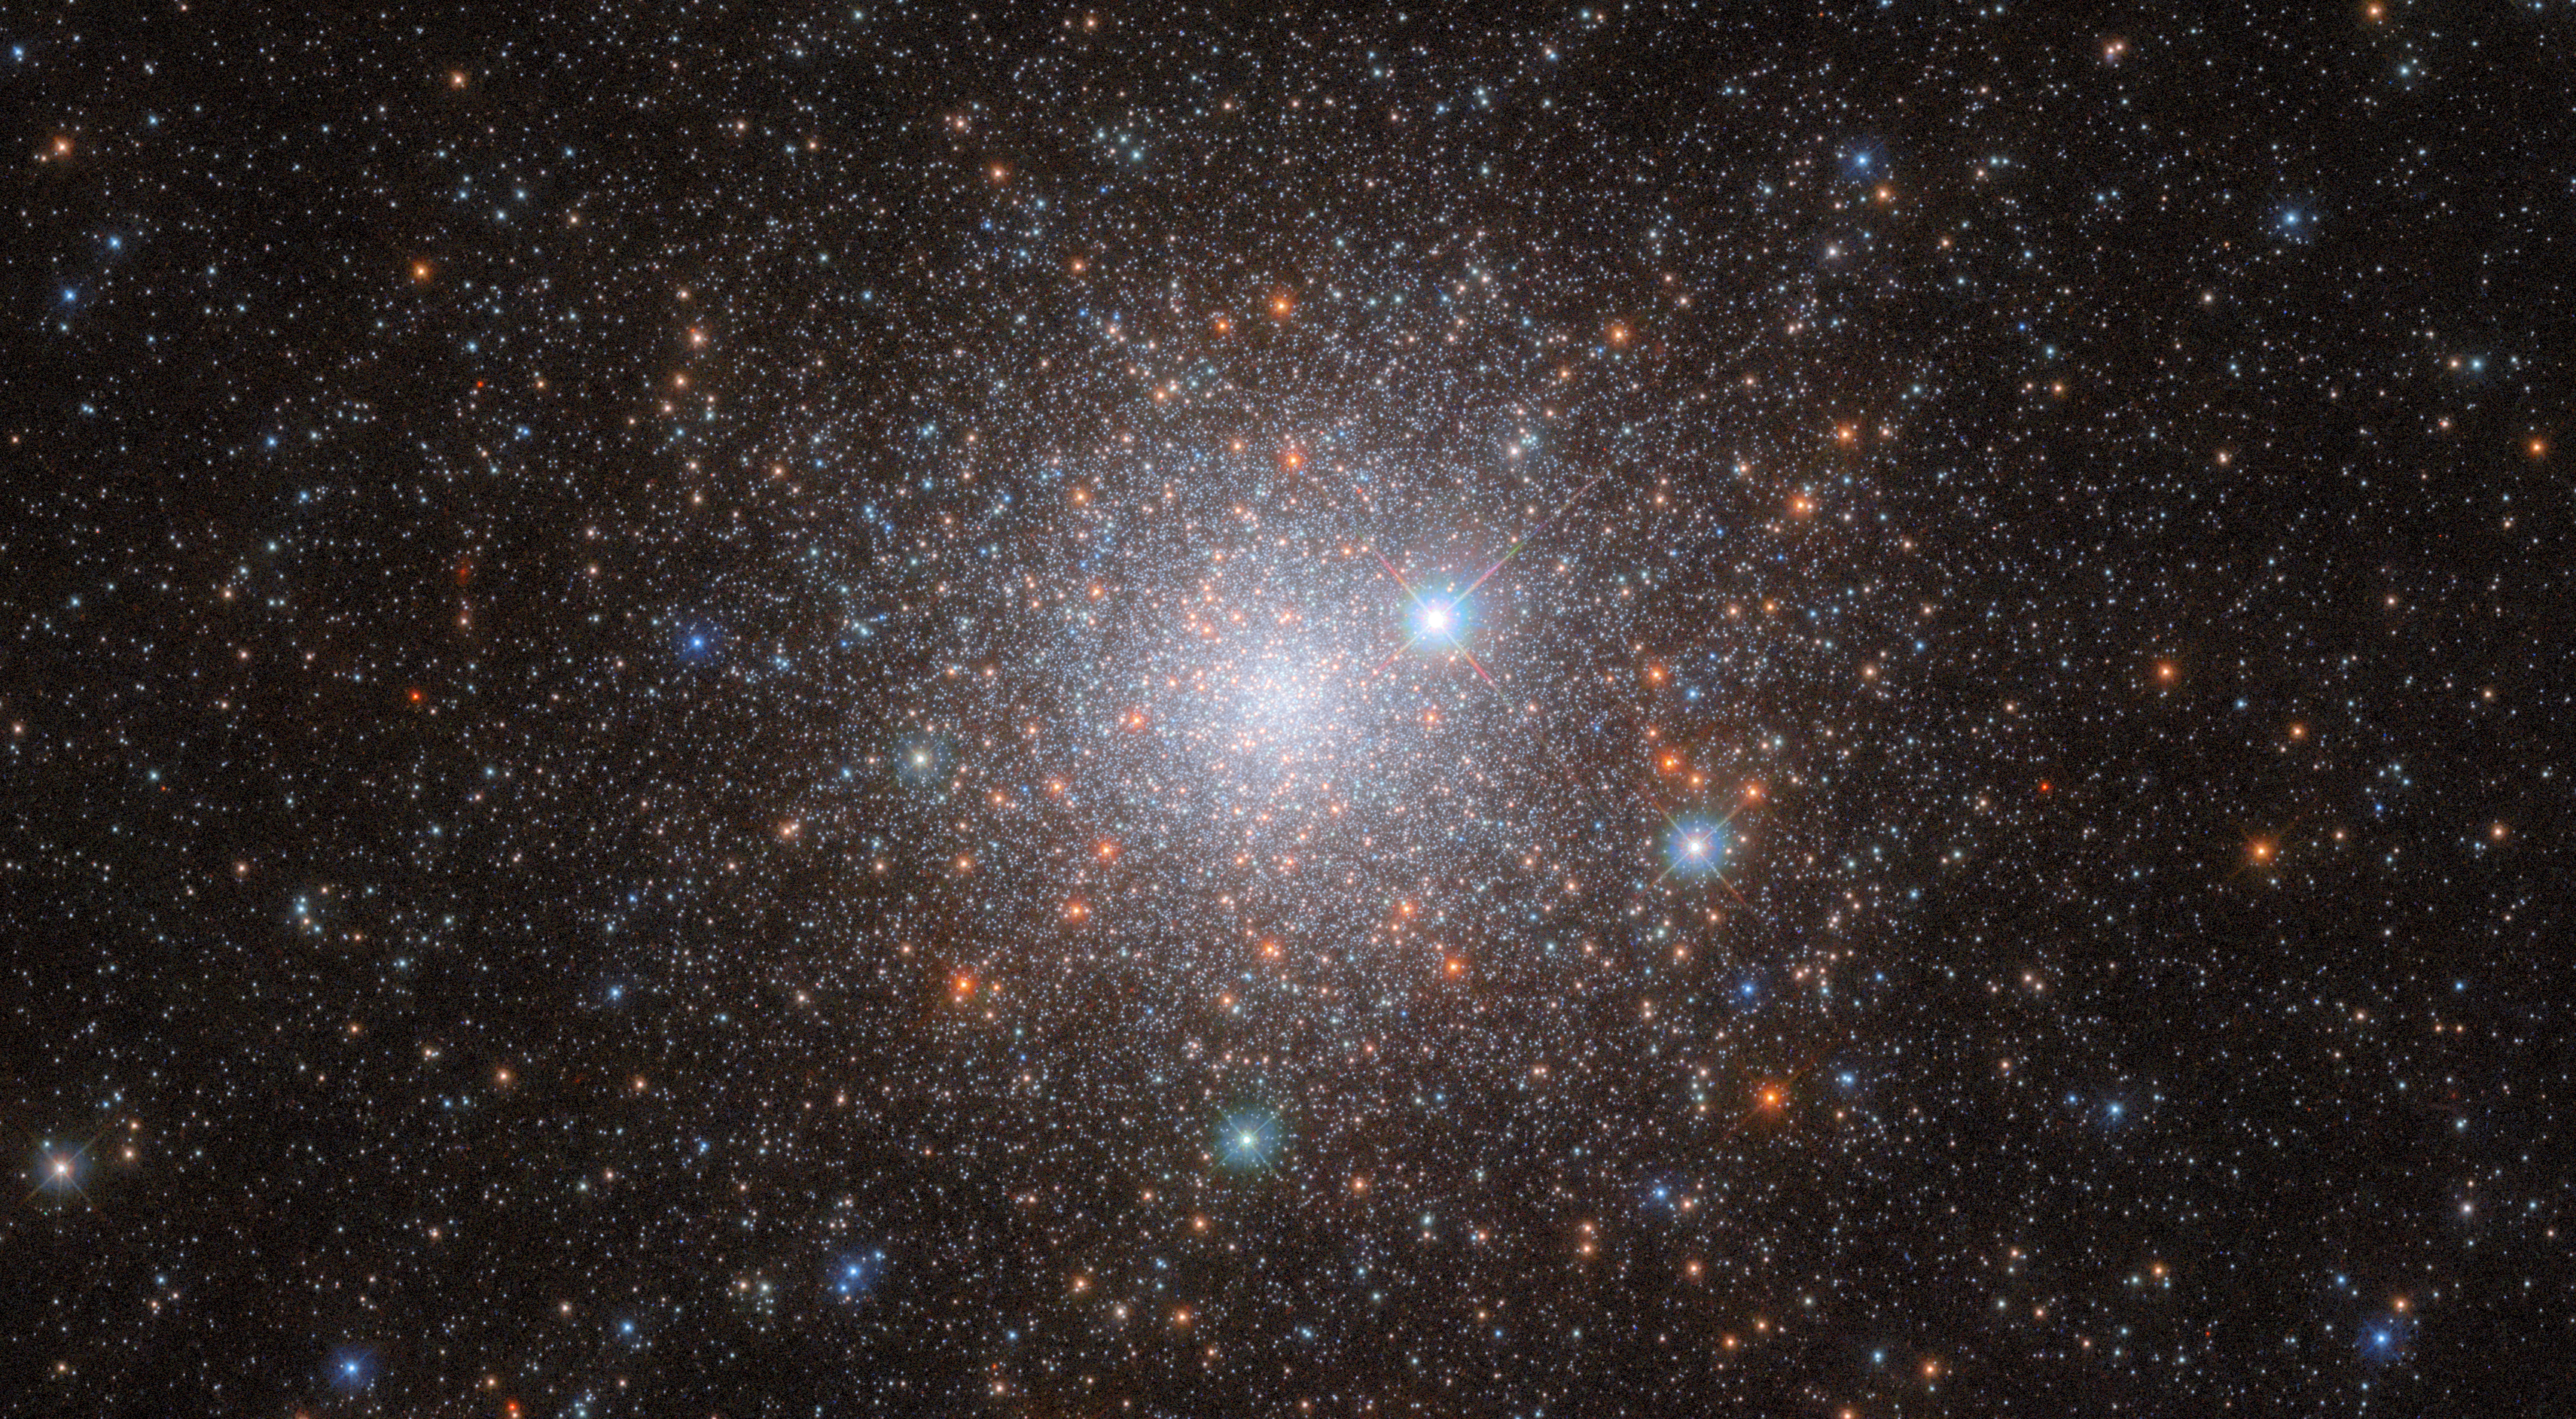

Digging up a galactic time capsule

For this ESA/Hubble Picture of the Week, we gaze upon the field of stars that is NGC 1786. This object is a globular cluster in the Large Magellanic Cloud (LMC), a small satellite galaxy of the Milky Way Galaxy that is approximately 160 000 light-years away from Earth. NGC 1786 itself is in the constellation Dorado. It was discovered in the year 1835 by John Herschel.

The data for this image comes from an observing programme comparing old globular clusters in nearby dwarf galaxies — the LMC, the Small Magellanic Cloud and the Fornax dwarf spheroidal galaxy — to the globular clusters in the Milky Way galaxy. Our galaxy contains over 150 of these old, spherical collections of tightly-bound stars, which have been studied in depth — especially with Hubble Space Telescope images like this one, which show them in previously-unattainable detail. Being very stable and long-lived, they act as galactic time capsules, preserving stars from the earliest stages of a galaxy’s formation.

Astronomers once thought that the stars in a globular cluster all formed together at about the same time, but study of the old globular clusters in our galaxy has uncovered multiple populations of stars with different ages. In order to use globular clusters as historical markers, we must understand how they form and where these stars of varying ages come from. This observing programme examined old globular clusters like NGC 1786 in these external galaxies to see if they, too, contain multiple populations of stars. This research can tell us more not only about how the LMC was originally formed, but the Milky Way Galaxy, too.

Credit: ESA/Hubble & NASA, M. Monelli Acknowledgement: M. H. Özsaraç